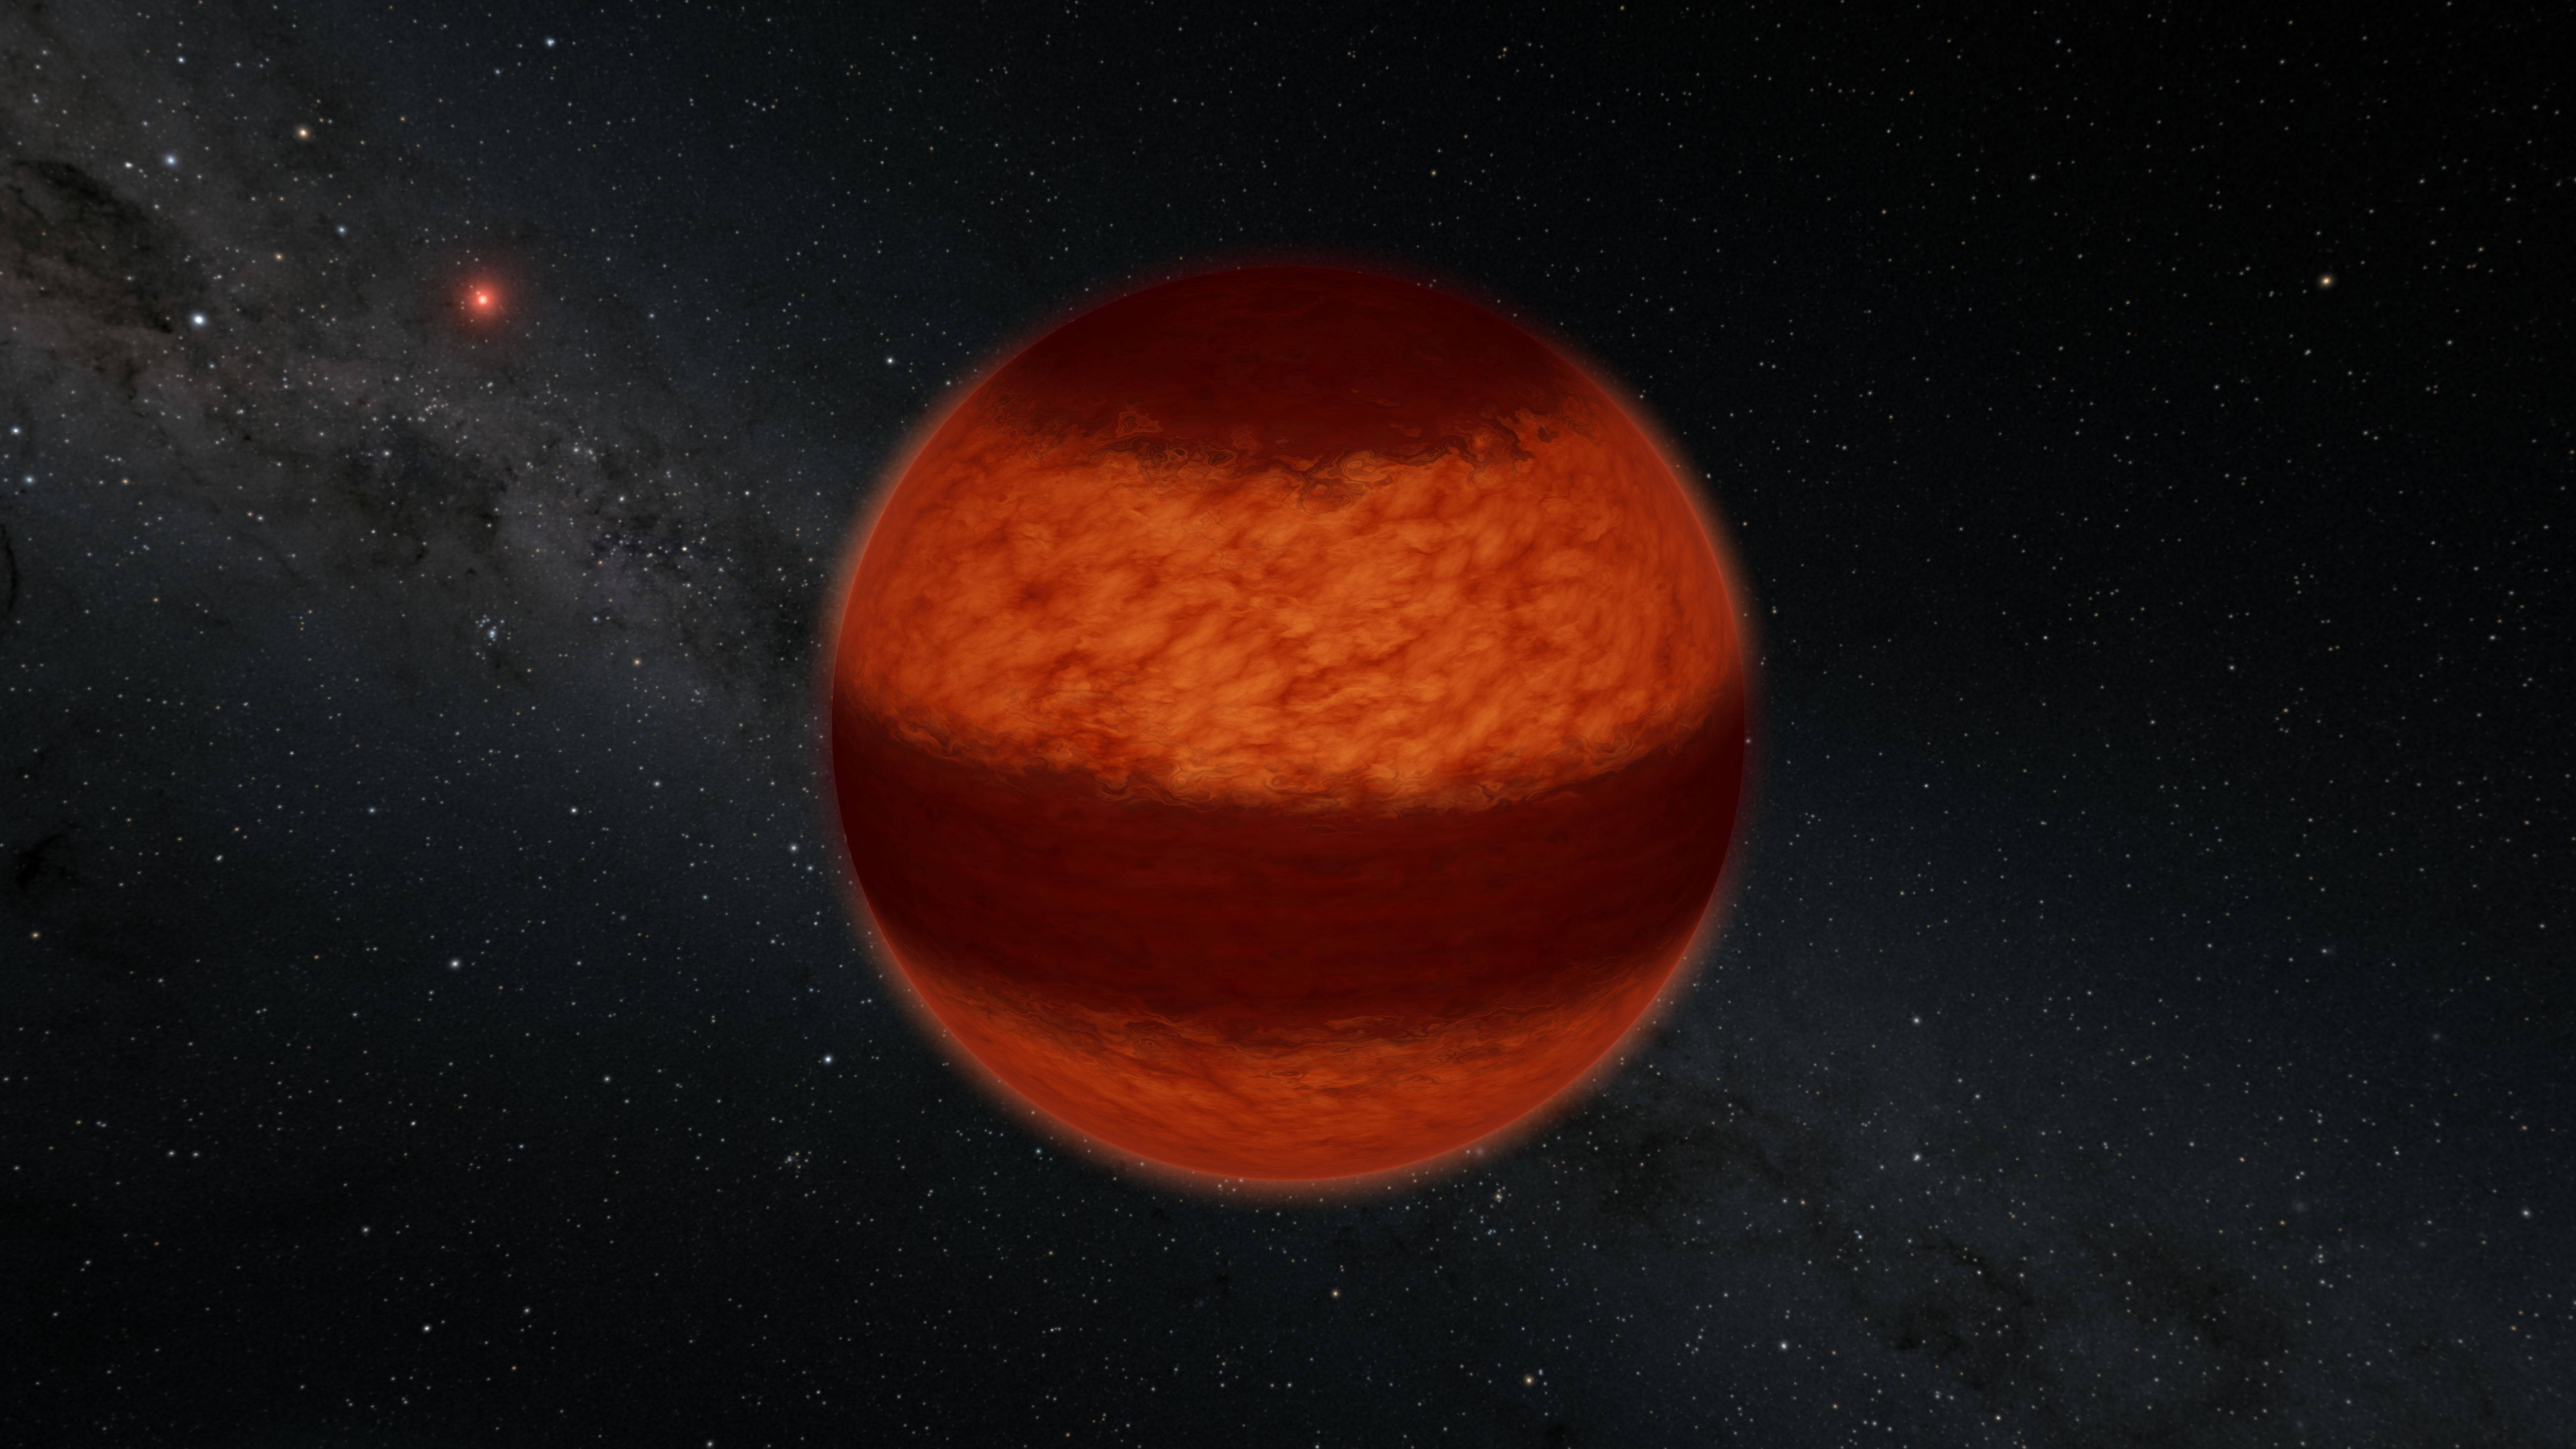

Luhman 16A (Artist’s Impression)

Astronomers have found evidence for a striped pattern of clouds on the brown dwarf called Luhman 16A, as illustrated here in this artist's impression. The bands of clouds were inferred using a technique called polarimetry, in which polarized light is measured from an astrophysical object much like polarized sunglasses are used to block out glare. This is the first time that polarimetry has been used to measure cloud patterns on a brown dwarf.

The red object in the background is Luhman 16B, the partner brown dwarf to Luhman 16A. Together, this pair is the closest brown dwarf system to Earth at 6.5 light-years away.

Credit: Caltech/R. Hurt (IPAC)